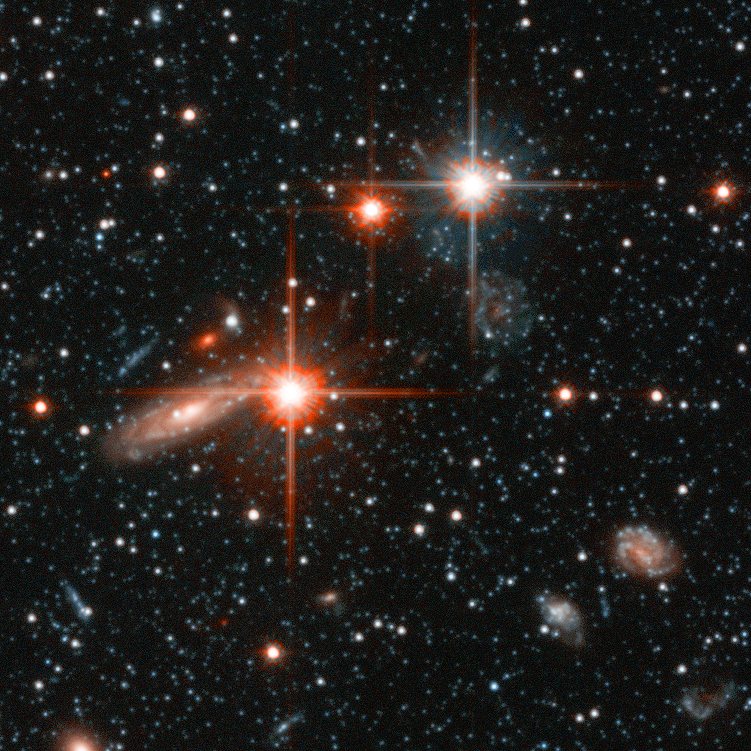

Andromeda Galaxy Halo Details - 3

Relying on the deepest visible-light images ever taken in space, astronomers using NASA's Hubble Space Telescope (HST) have reliably measured the age of the spherical halo of stars surrounding the neighboring Andromeda galaxy (M31). To their surprise, they have discovered that approximately one-third of the stars in Andromeda's halo formed only 6 to 8 billion years ago. That's a far cry from the 11-to-13 billion-year age of the stars in the Milky Way's halo.

Credit: NASA, ESA and T.M. Brown (STScI)